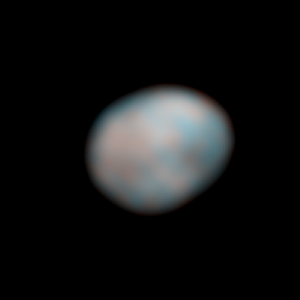

Vesta - HST - 260° longitude

Vesta - HST - 260° longitude

Credit: NASA, ESA, J.-Y. Li (University of Maryland, College Park), and L. McFadden (NASA/GSFC)